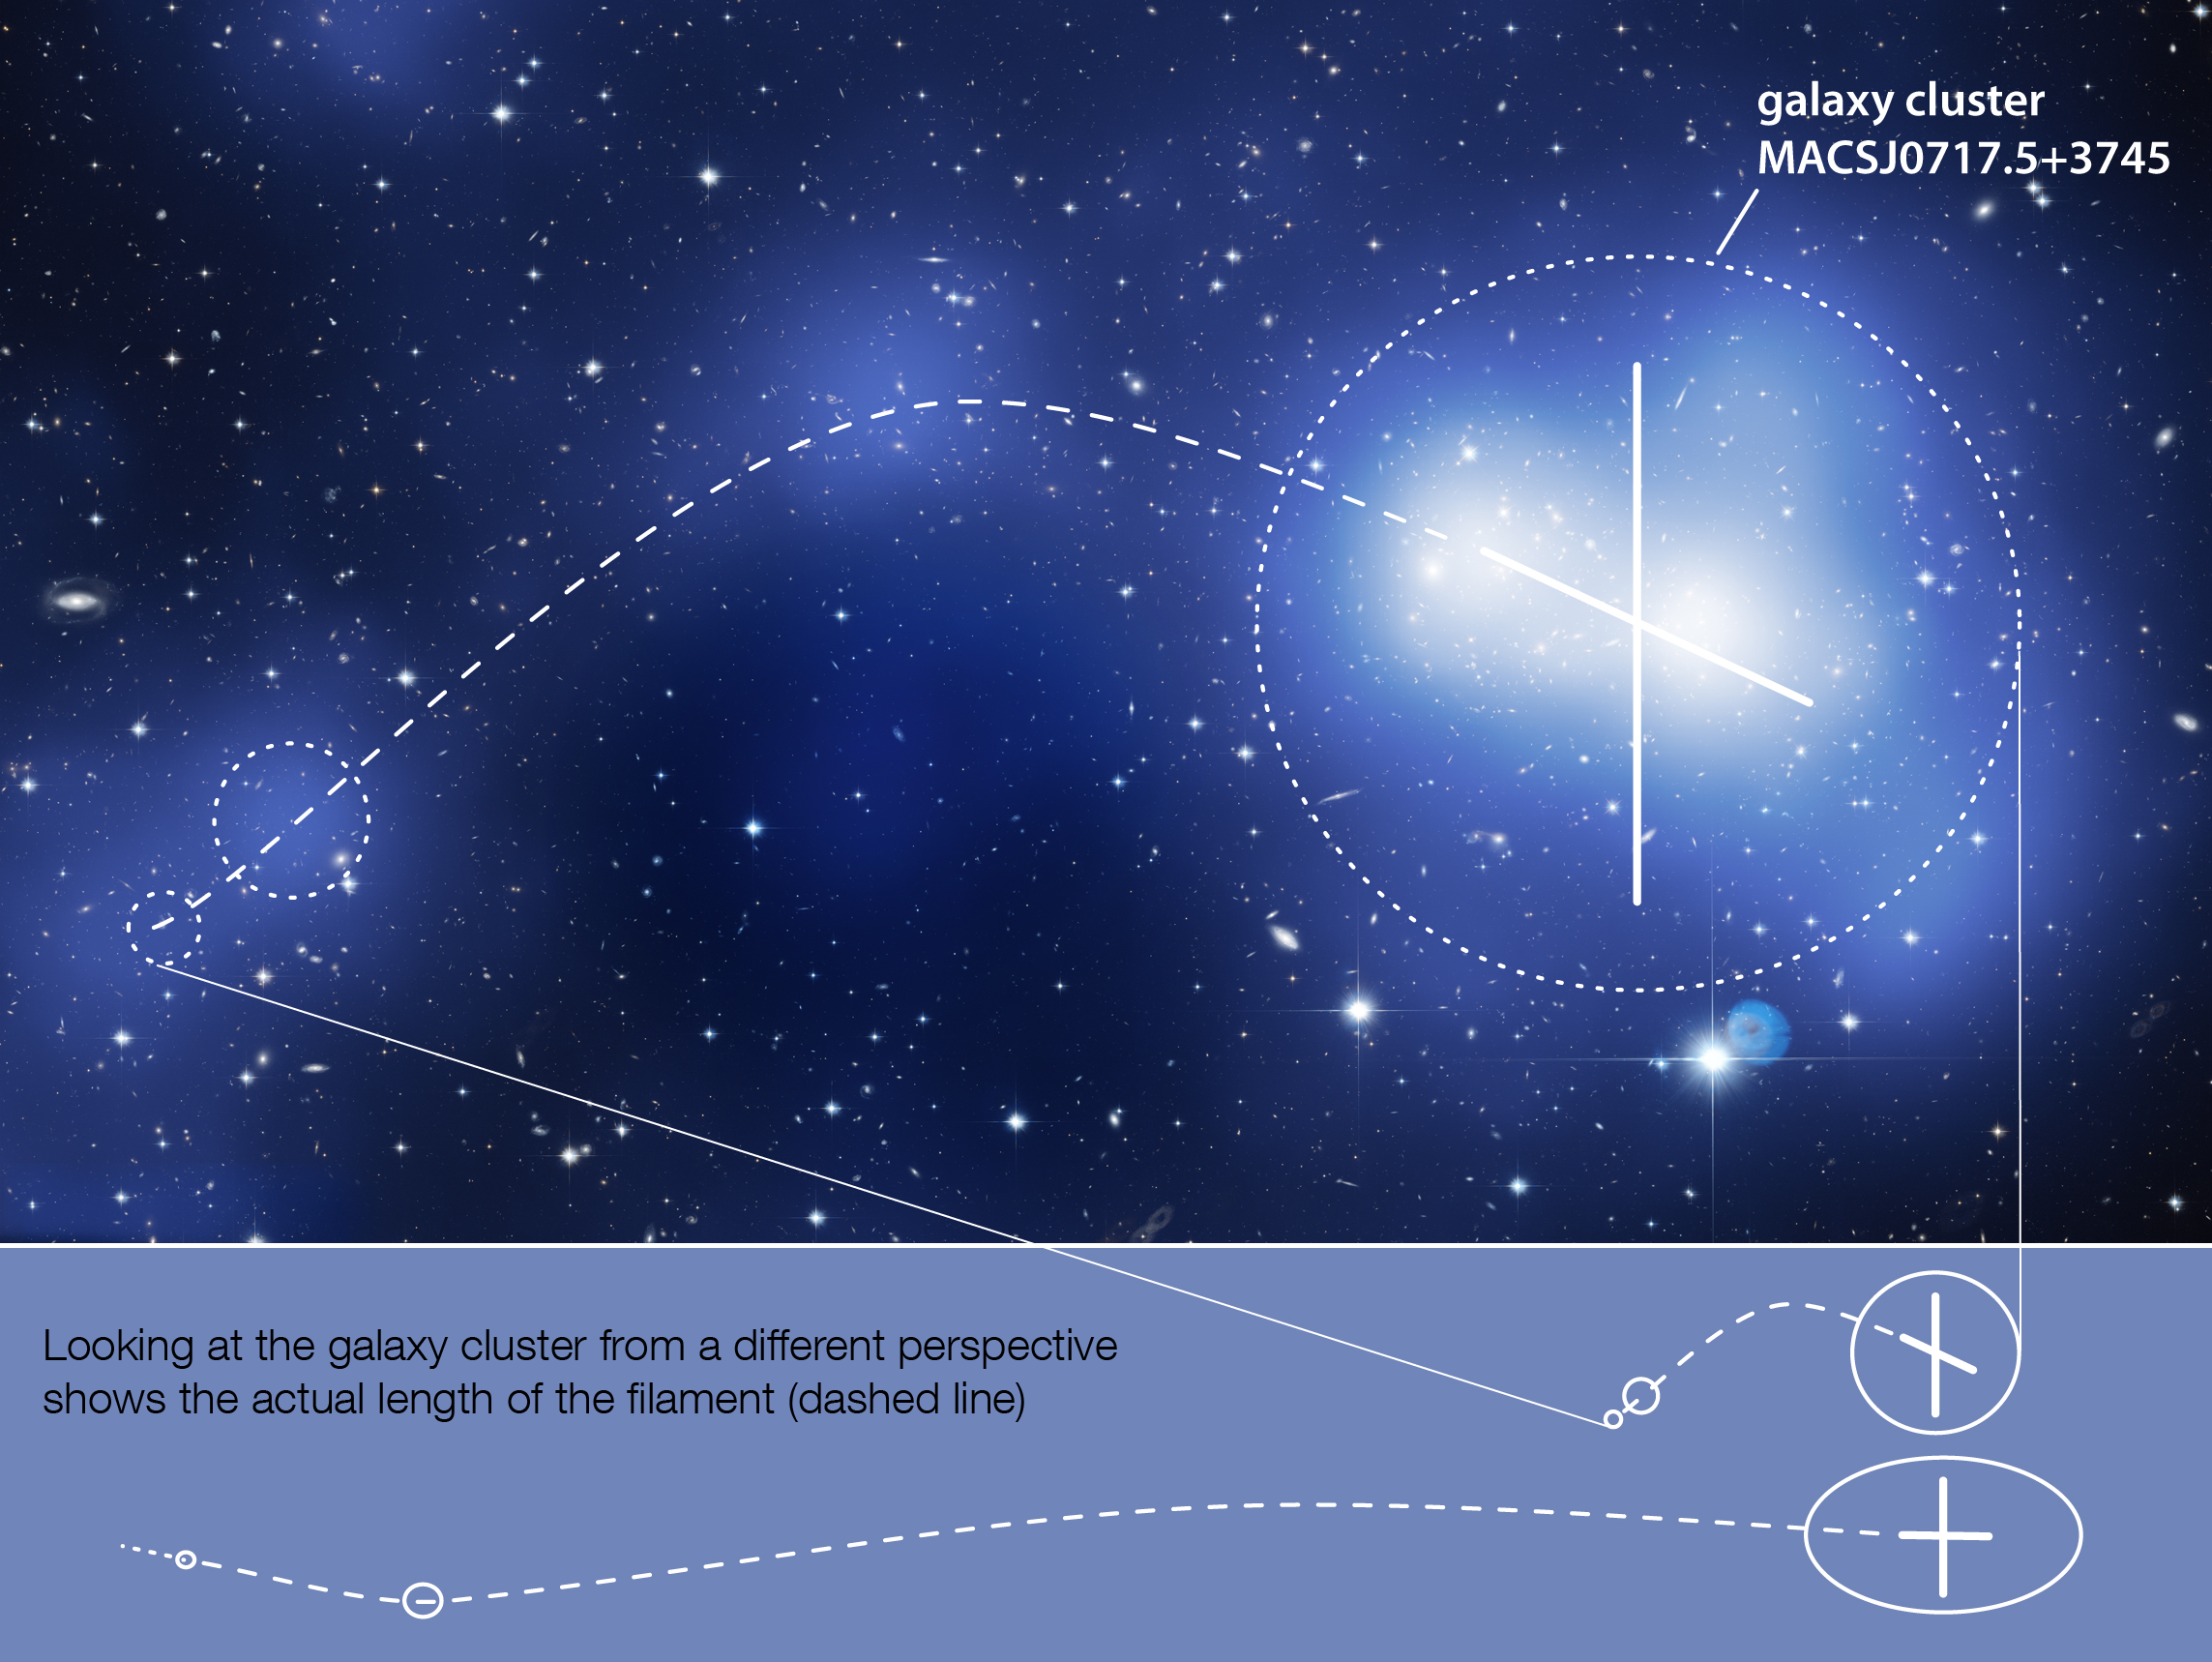

The geometry of MACS J0717

This diagram shows Hubble’s image of MACS J0717 overlaid with the location of the cluster and filament’s mass (in blue), and with a schematic of the cluster and filament (in white). Below, the diagram shows the geometry from our perspective in which the filament lies almost directly along our line of sight, and from a different perspective in which the filament is seen side-on. This shows how the filament appears greatly foreshortened from our perspective.

Credit: NASA, ESA, Harald Ebeling (University of Hawaii), Karen Teramura (University of Hawaii)